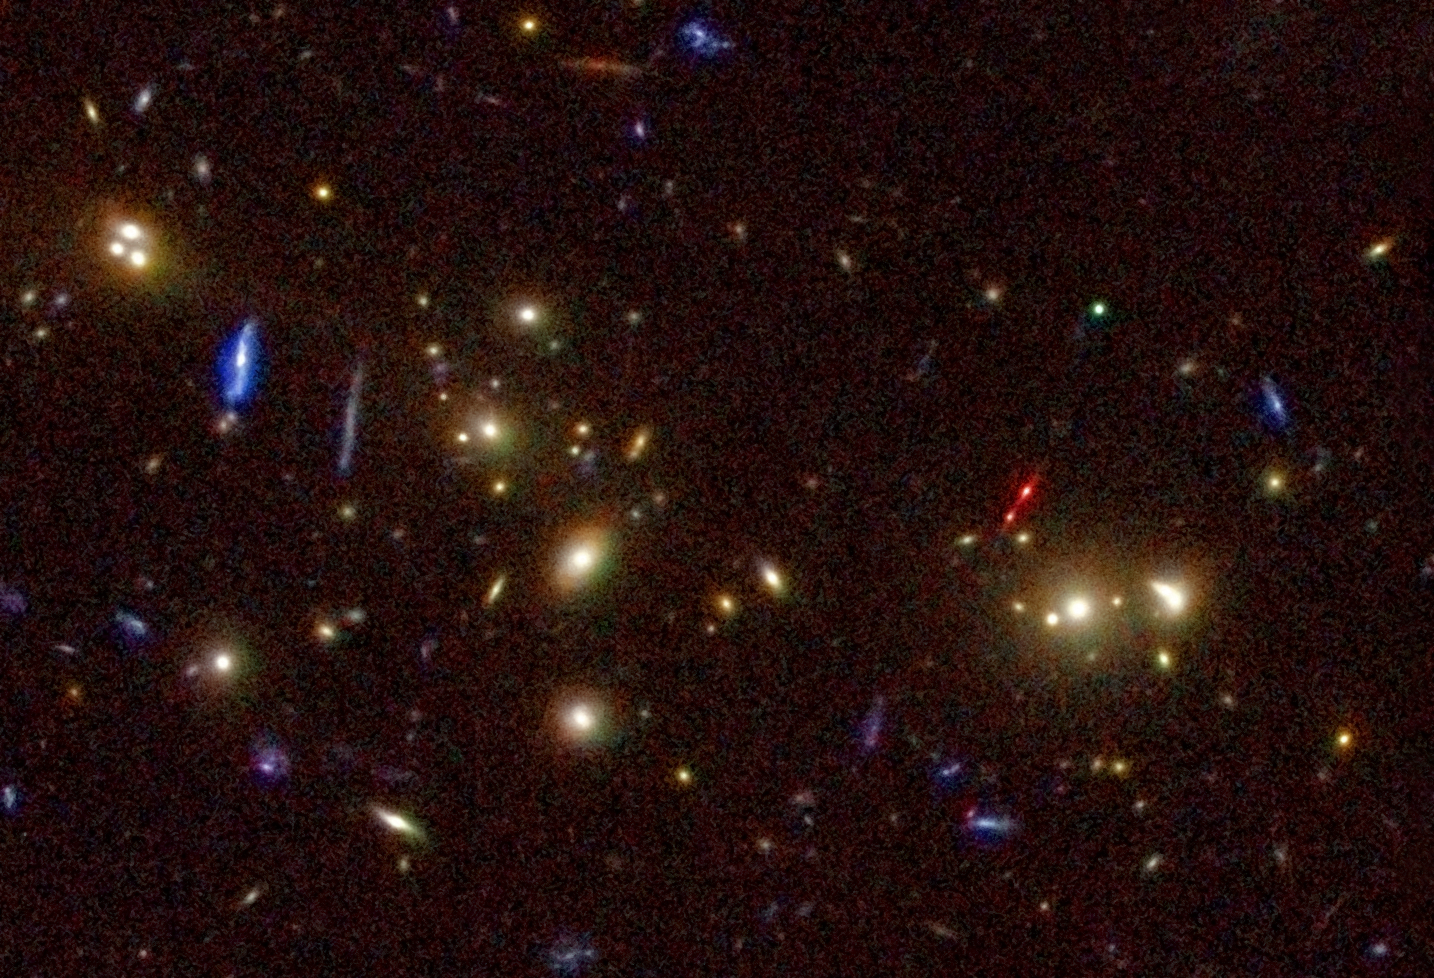

The Lynx Arc (WFPC 2 view)

This NASA/ESA Hubble Space Telescope image of the Lynx cluster of galaxies shows the doubled image of the red Lynx Arc (just right of the centre). The puzzling arc is in reality a distant mega-cluster of stars far behind the galaxy cluster in the northern constellation of Lynx. The arc is the stretched and magnified image of 12 000 million light-year distant star-forming region. This remote source existed when the Universe was less than 2000 million years old. The discovery of this unique and tantalising object was the result of a systematic study of distant clusters of galaxies carried out with major X-ray, optical and infrared telescopes, including the Hubble Space Telescope, ROSAT and the Keck Telescopes. Bob Fosbury, of the European Space Agency's Space Telescope-European Coordinating Facility in Germany, and a team of international co-authors report the discovery in the 20 October 2003 issue of the Astrophysical Journal. The Hubble image, taken in deep red light with the Wide Field and Planetary Camera 2, has been coloured using six ground-based images from the blue to the infrared. These images were taken with the Mayall 4-m Telescope at NOAO's Kitt Peak Observatory in Arizona, USA.

Credit: European Space Agency, NASA, Robert A.E. Fosbury (European Space Agency/Space Telescope-European Coordinating Facility, Germany) and NOAO